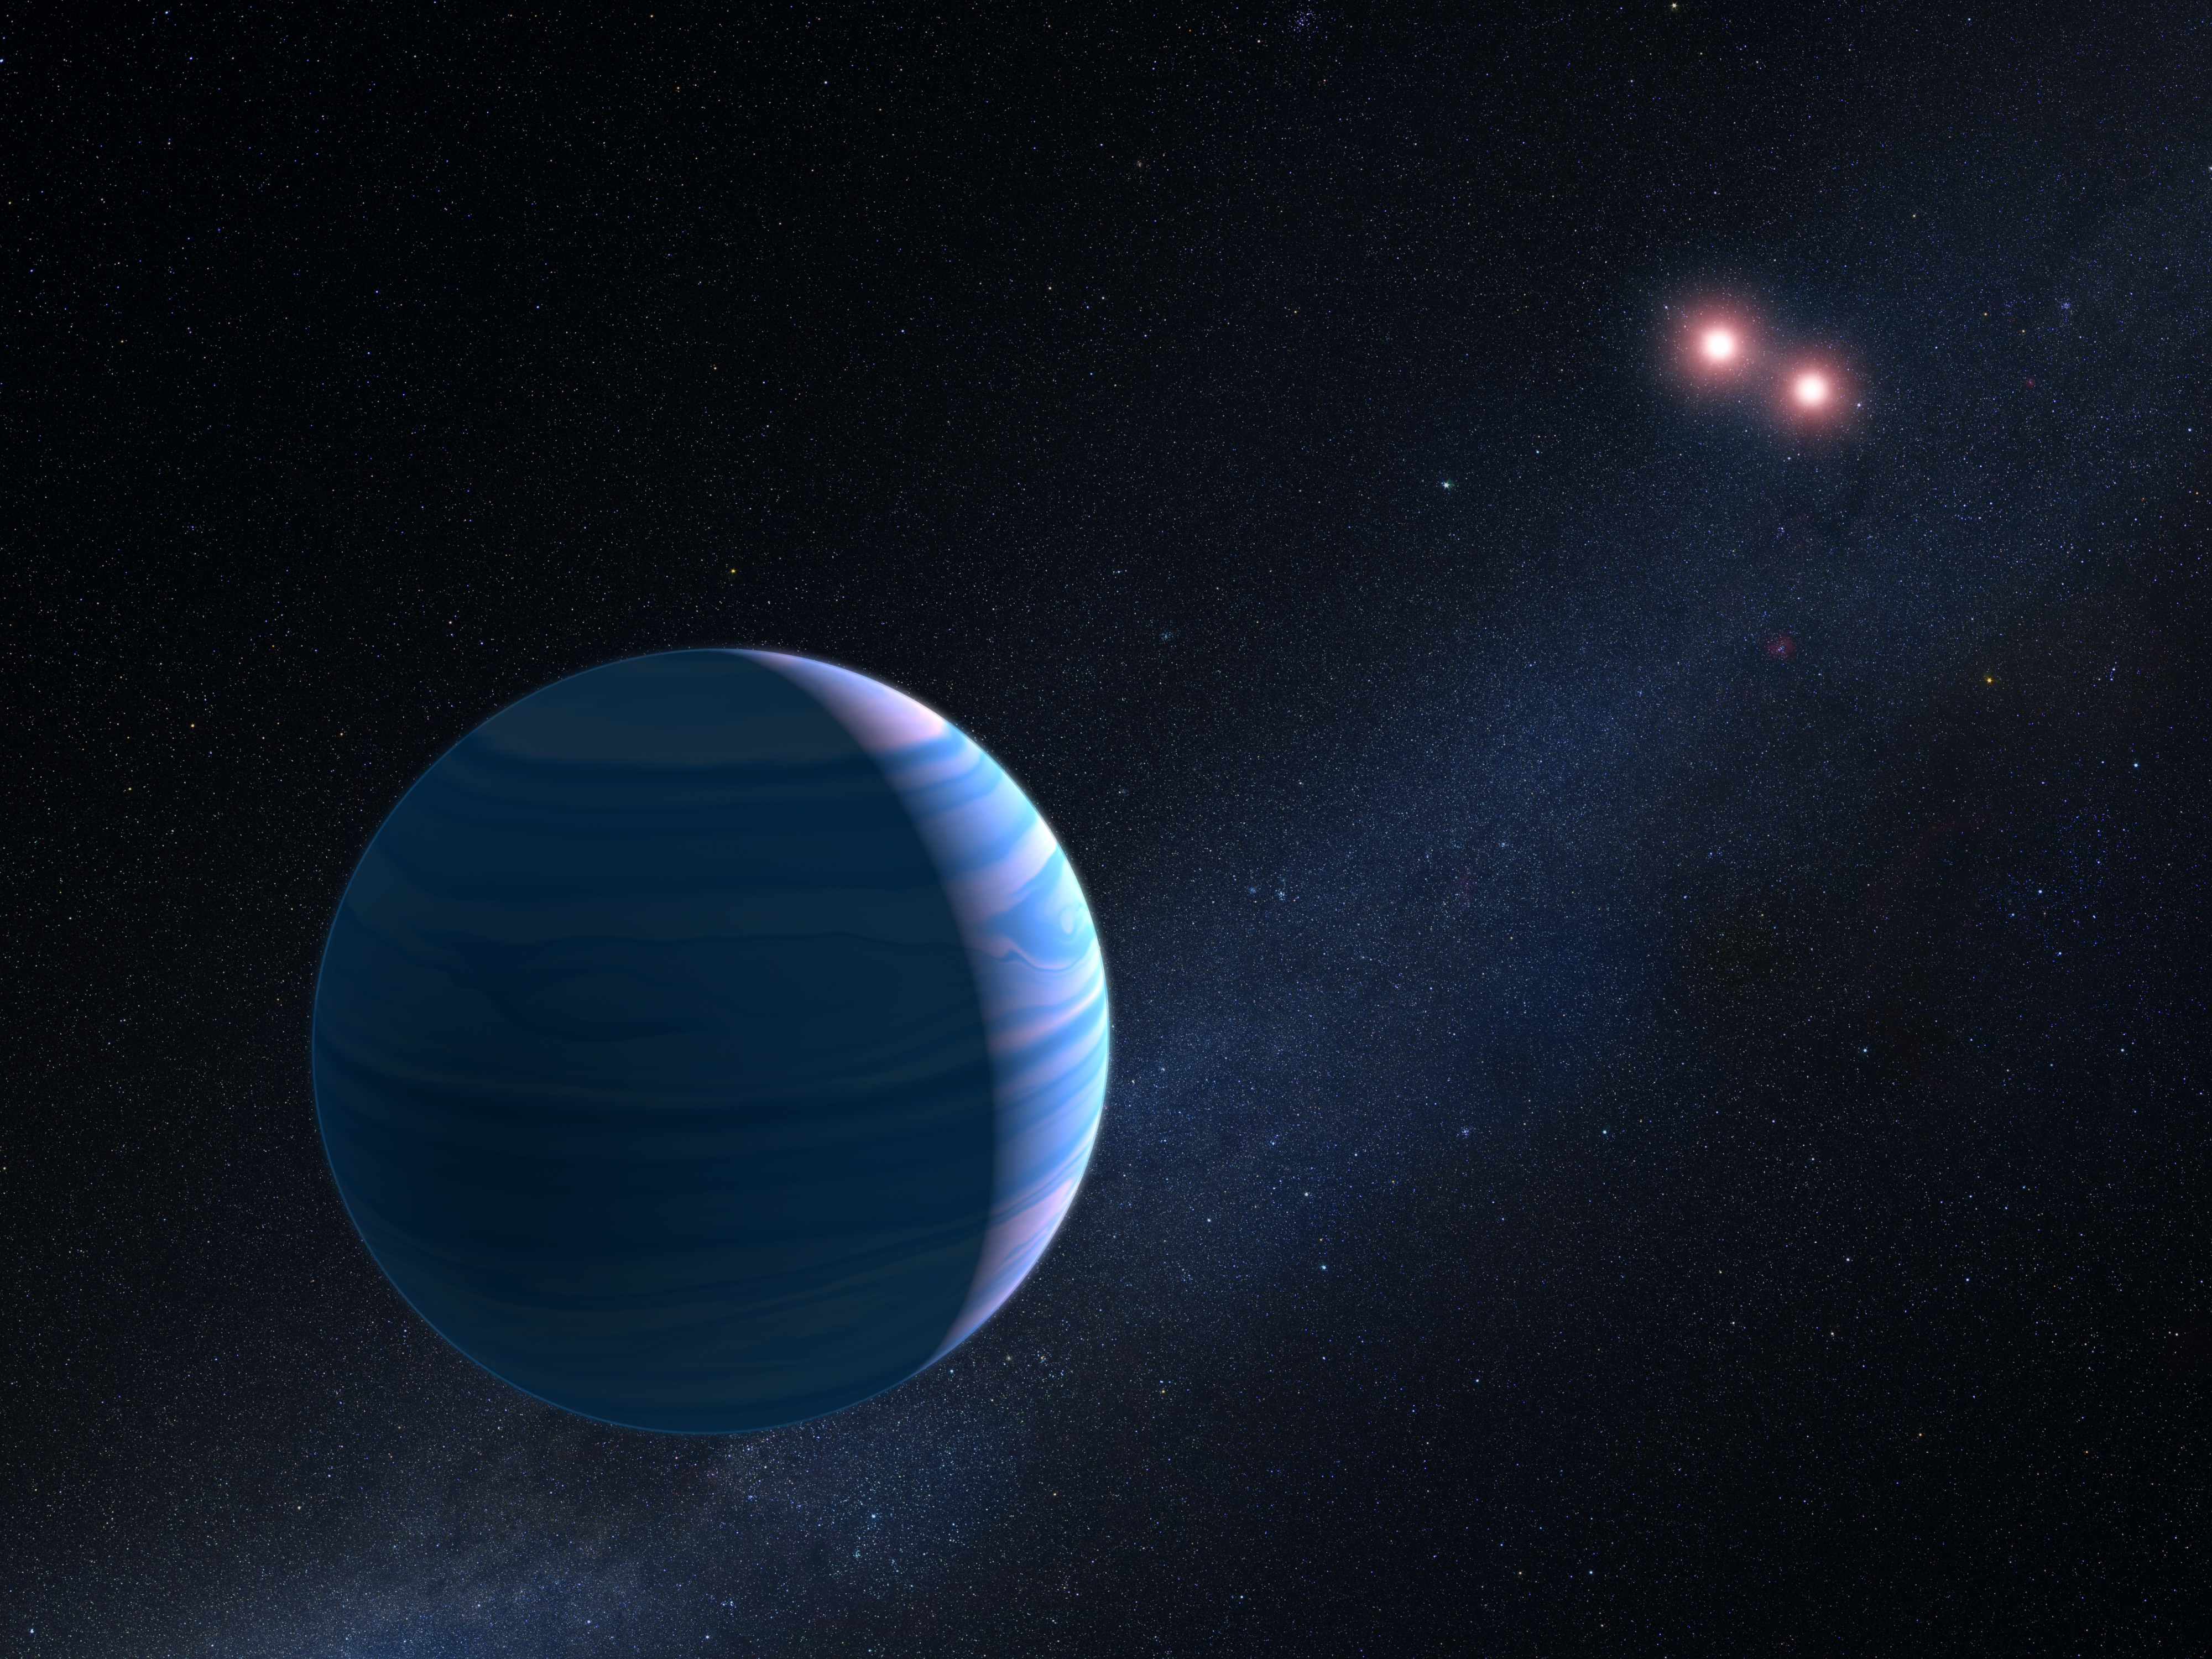

Artist’s impression of exoplanet orbiting two stars

This artist’s impression shows a gas giant planet circling the two red dwarf stars in the system OGLE-2007-BLG-349, located 8 000 light-years away. The planet — with a mass similar to Saturn — orbits the two stars at a distance of roughly 480 million kilometres. The two red dwarf stars are a mere 11 million kilometres apart.

The artist's impression is based on observations made with Hubble that helped astronomers confirm the existence of a planet orbiting The two stars in the system.

The system is too far away for Hubble to take an image of the planet. Instead, its presence was inferred from gravitational microlensing. This phenomenon occurs when the gravity of a foreground star bends and amplifies the light of a background star that momentarily aligns with it. The particular character of the light magnification can reveal clues to the nature of the foreground star and any associated planets. The Hubble observations represent the first time such a three-body system has been confirmed using the gravitational microlensing technique.

Credit: NASA, ESA, and G. Bacon (STScI)